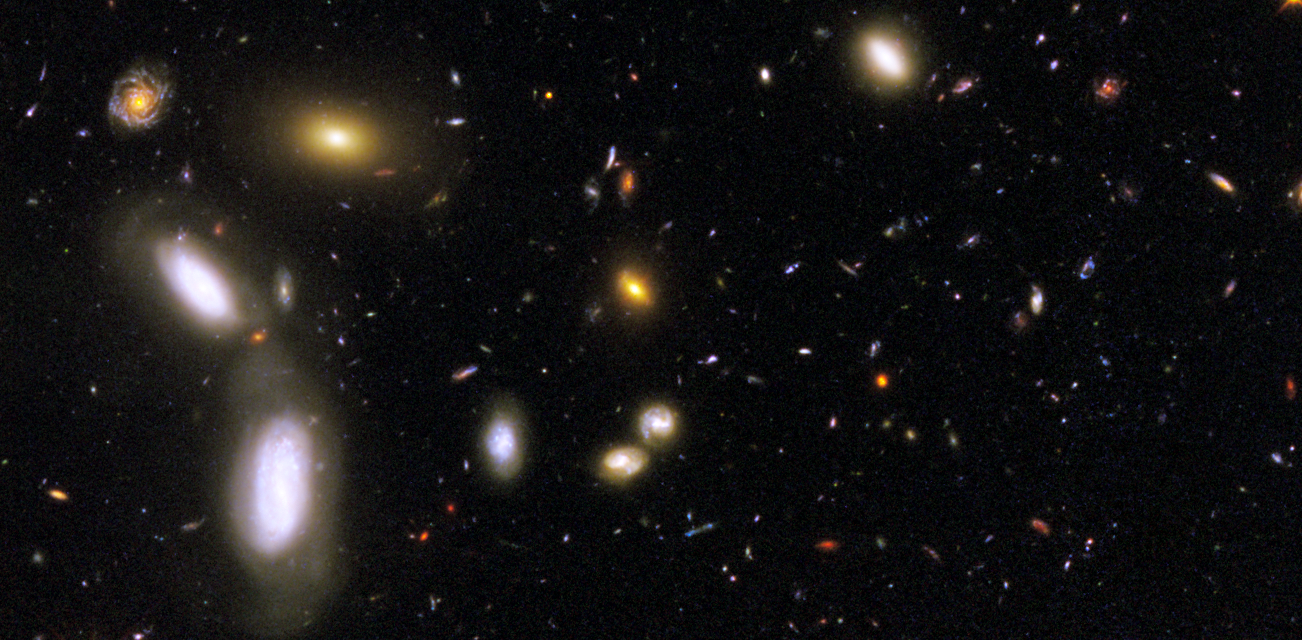

GOODS South WFC3 ERS Details 1

This image, taken by NASA's Hubble Space Telescope, was made from mosaics taken in September and October 2009 with the newly installed Wide Field Camera 3 (WFC3) and in 2004 with the Advanced Camera for Surveys (ACS).

Credit: NASA, ESA, R. Windhorst, S. Cohen, M. Mechtley, and M. Rutkowski (Arizona State University, Tempe), R. O'Connell (University of Virginia), P. McCarthy (Carnegie Observatories), N. Hathi (University of California, Riverside), R. Ryan (University of California, Davis), H. Yan (Ohio State University) and A. Koekemoer (Space Telescope Science Institute)